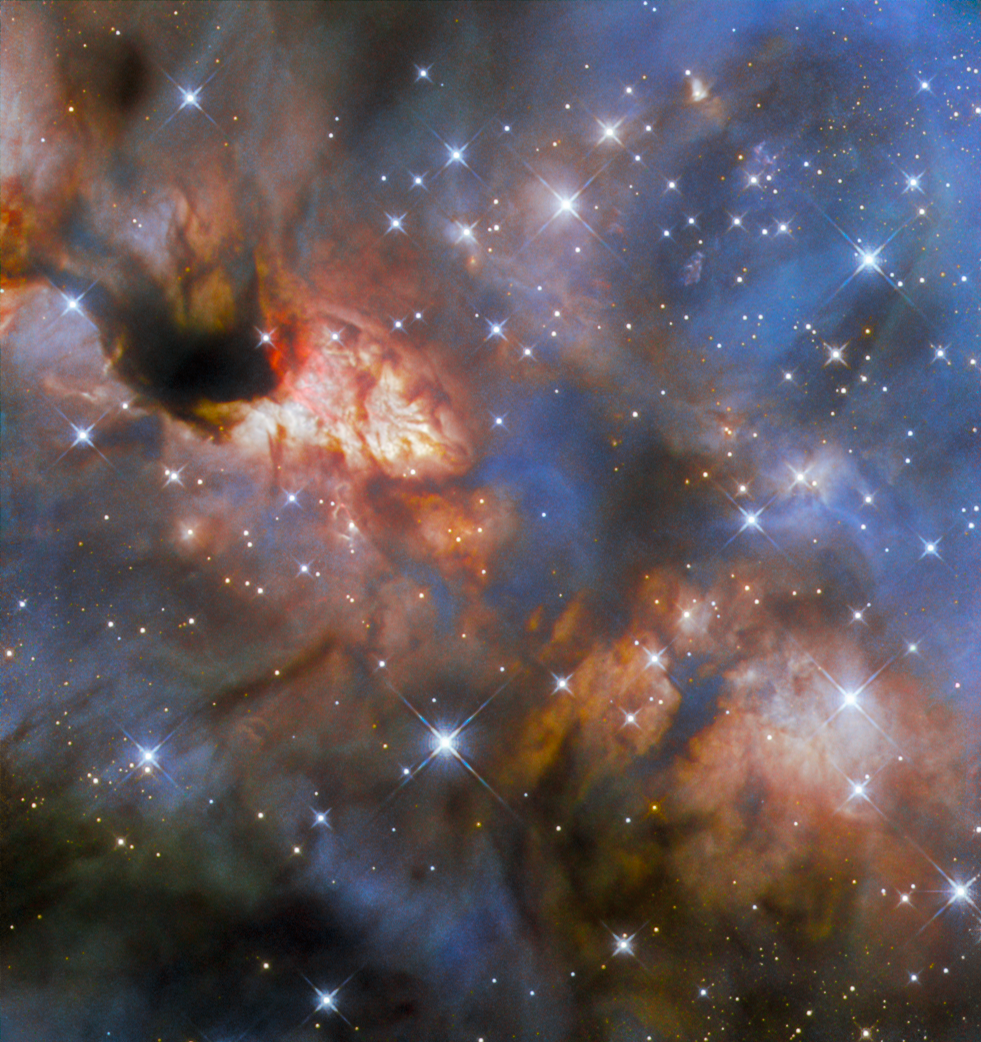

Colouring what human eyes can’t see

If the Hubble Picture of the Week from two weeks ago was somewhat dim and subtle in appearance, then this week’s image is a veritable riot of colour and activity! It features a relatively close-by star-forming region known as IRAS 16562-3959 that lies within the Milky Way in the constellation Scorpius, about 5900 light-years from Earth.

This image was compiled using observations from Hubble’s Wide Field Camera 3 (WFC 3). The detailed nuances of colour are possible because of the four separate filters that were used to collect the data. Filters are thin slivers of highly specialised material that only allow very specific wavelengths of light through. They can be slid in front of the part of the telescope that is sensitive to light, letting astronomers control which wavelengths of light the telescope collects with each observation. This is useful not only for specific scientific research, but also for the creation of images like this one.

Raw telescope observations are always monochrome, regardless of which filter was used. However, specially trained artists and image specialists can select colours that match the wavelength range covered by individual filters. Or, in the case where a direct match is not possible — such as for the data used in this image, which are all in the infrared regime, which human eyes are not sensitive to — the artist can select a colour that sensibly represents what is taking place. For example, they might assign bluer colours to shorter wavelengths and redder colours to longer wavelengths, as is the case in the visible light range. Then, data from multiple filters can be combined to build up a multi-colour image, that both looks beautiful and has scientific meaning.

At the centre of the image, IRAS 16562-3959 is thought to host a massive star — about 30 times the mass of our Sun — that is still in the process of forming. At the near-infrared wavelengths to which Hubble is sensitive, the central region appears dark because there is so much obscuring dust in the way. However near-infrared light leaks out mainly on two sides — upper left and lower right — where a powerful jet from the massive protostar has cleared away the dust. Multi-wavelength images including this incredible Hubble scene will help us gain a better understanding of how the most massive, brightest stars in our galaxy are born.

Credit: ESA/Hubble & NASA, R. Fedriani, J. Tan